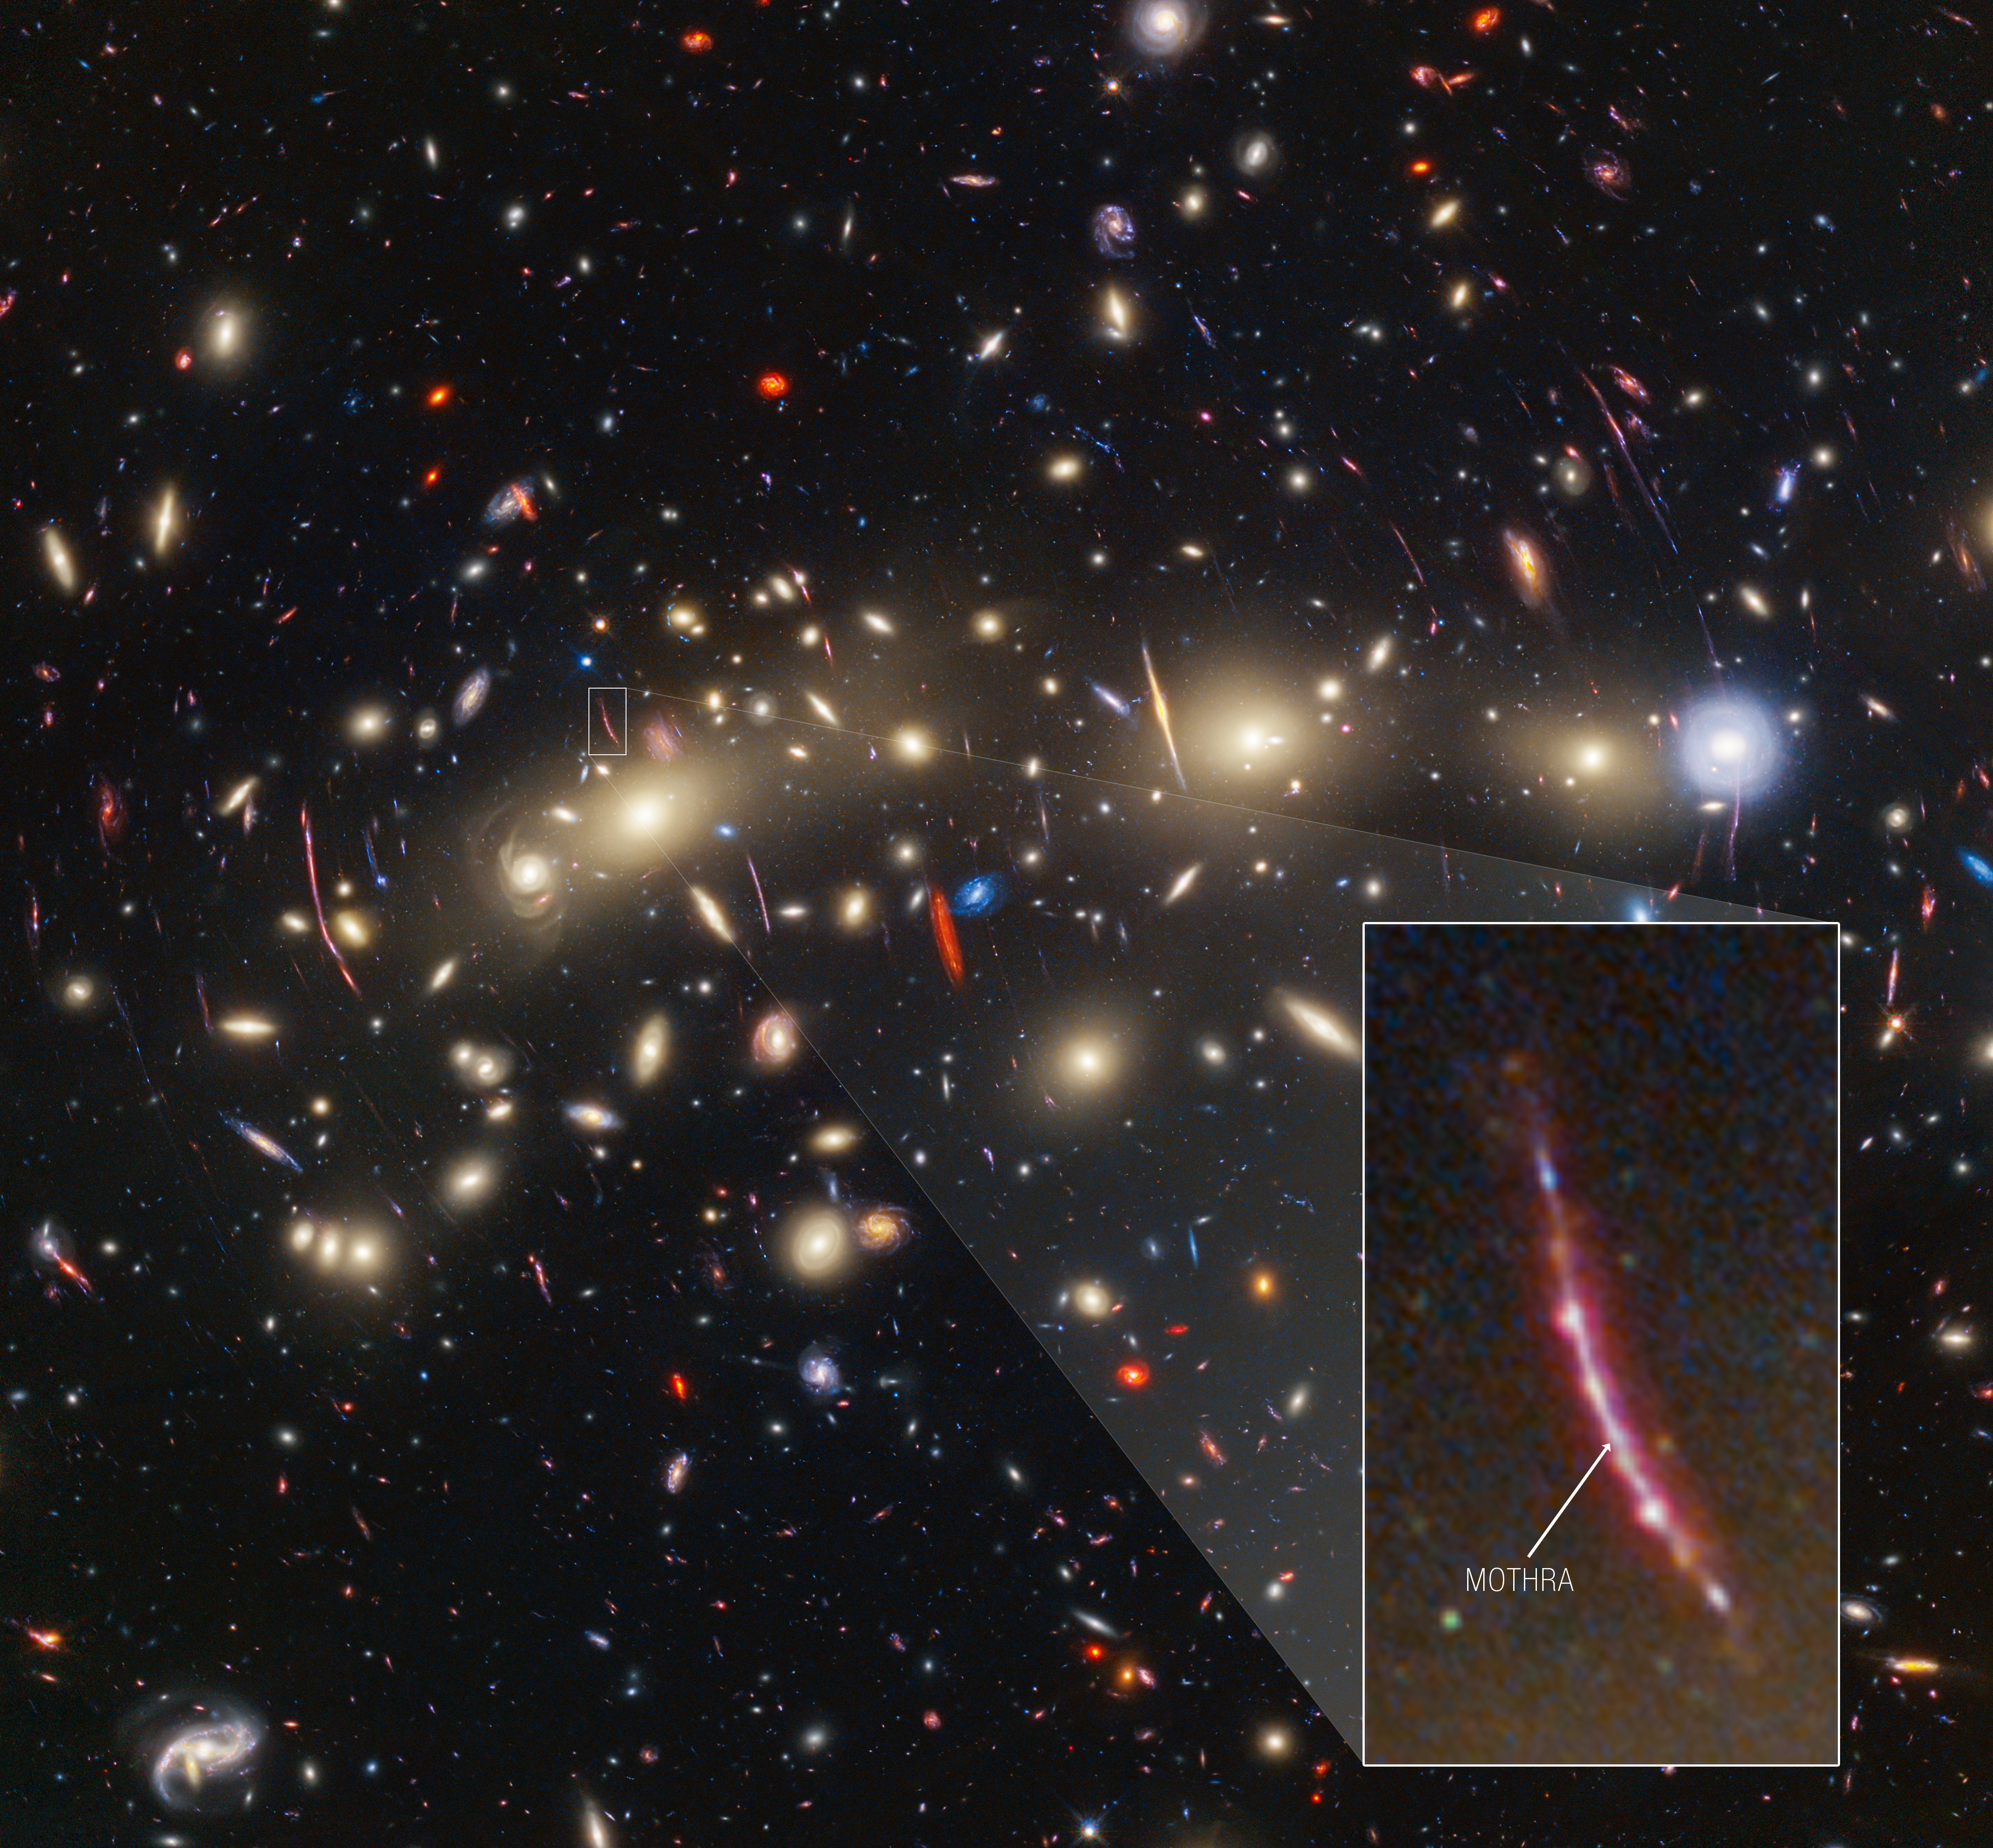

Galaxy cluster MACS0416 with Mothra pullout

This image of galaxy cluster MACS0416 highlights one particular gravitationally lensed background galaxy, which existed about 3 billion years after the big bang. That galaxy contains a transient, or object that varies in observed brightness over time, that the science team nicknamed “Mothra.” Mothra is a star that is magnified by a factor of at least 4,000 times. The team believes that Mothra is magnified not only by the gravity of galaxy cluster MACS0416, but also by an object known as a “milli-lens” that likely weighs about as much as a globular star cluster.

Credit: NASA, ESA, CSA, STScI, J. Diego (Instituto de Física de Cantabria, Spain), J. D’Silva (U. Western Australia), A. Koekemoer (STScI), J. Summers & R. Windhorst (ASU), and H. Yan (U. Missouri).